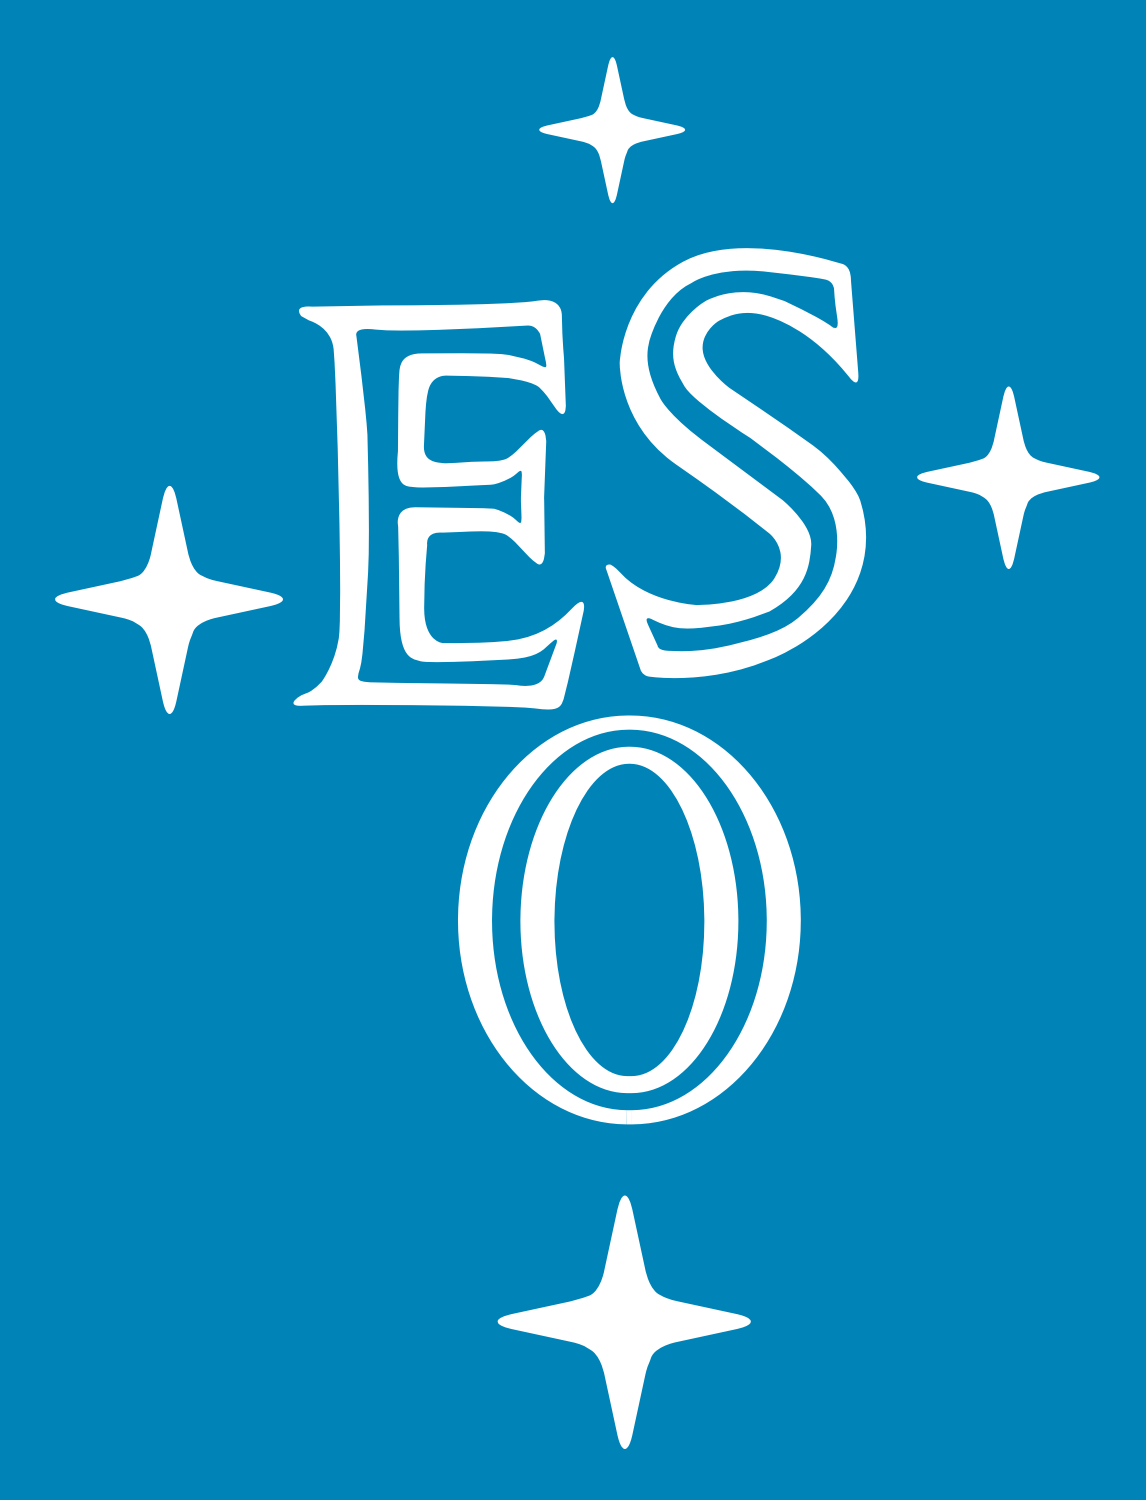

Open House Day at the Space Telescope European Coordinating Facility

On Sunday, 15th October 2006 from 10:00-17:00 there is a unique chance to meet the European team behind the Hubble Space Telescope – both scientists and people working in outreach and education. This opportunity is part of Open House Day at the European Southern Observatory (ESO) in Garching bei München, Germany.

This year's Open House Day, organised in collaboration with the other research institutes in the area, coincides with the opening of the U-Bahn line U6 to the research institutes in Garching.

There will not only be the latest news from the Hubble Space Telescope, but also plenty of information about ESO telescopes and technology. Experts are on hand to answer visitors' questions and explain the displays, together with lots of information material, free DVDs and more to take away. Make a day of it and have a look at some of the other research institutes in the area or just enjoy the big celebration marking the opening of the metro station here in Garching bei München.

The following activities are currently planned at ESO:

A video presentation about ESO
Short talks (on a 15 minute time schedule)
Information about employment opportunities at ESO
Exhibition and Video Conference with the Paranal Observatory in Chile
Presentation of the ESO/ECF Science Archive
Demonstration of the Astrophysical Virtual Observatory
Image processing and quality control of VLT data
ESA/ESO Space Telescope European Coordinating Facility (ST/ECF) , the European coordination centre for the Hubble Space Telescope
Presentation of astronomical instruments
Information about radioastronomy
Demonstration Computer Aided Design (CAD)
Demonstration Adaptive Optics
Observing possibilities with amateur telescopes
Demonstration of infrared detectors. Visitors can take away their own pictures
Light-sensitive CCD (Charge Coupled Device) demonstration
Exhibitions of the Volkssternwarte München and the Observatory of Königsleiten
An exhibition with astronomical paintings
A planetarium show for children
Kids' Corners: Games and Fun for children
Souvenir shop with posters, T-shirts, etc
Coffee and soft drinks in the ESO cafeteria

Credit: NASA & ESA